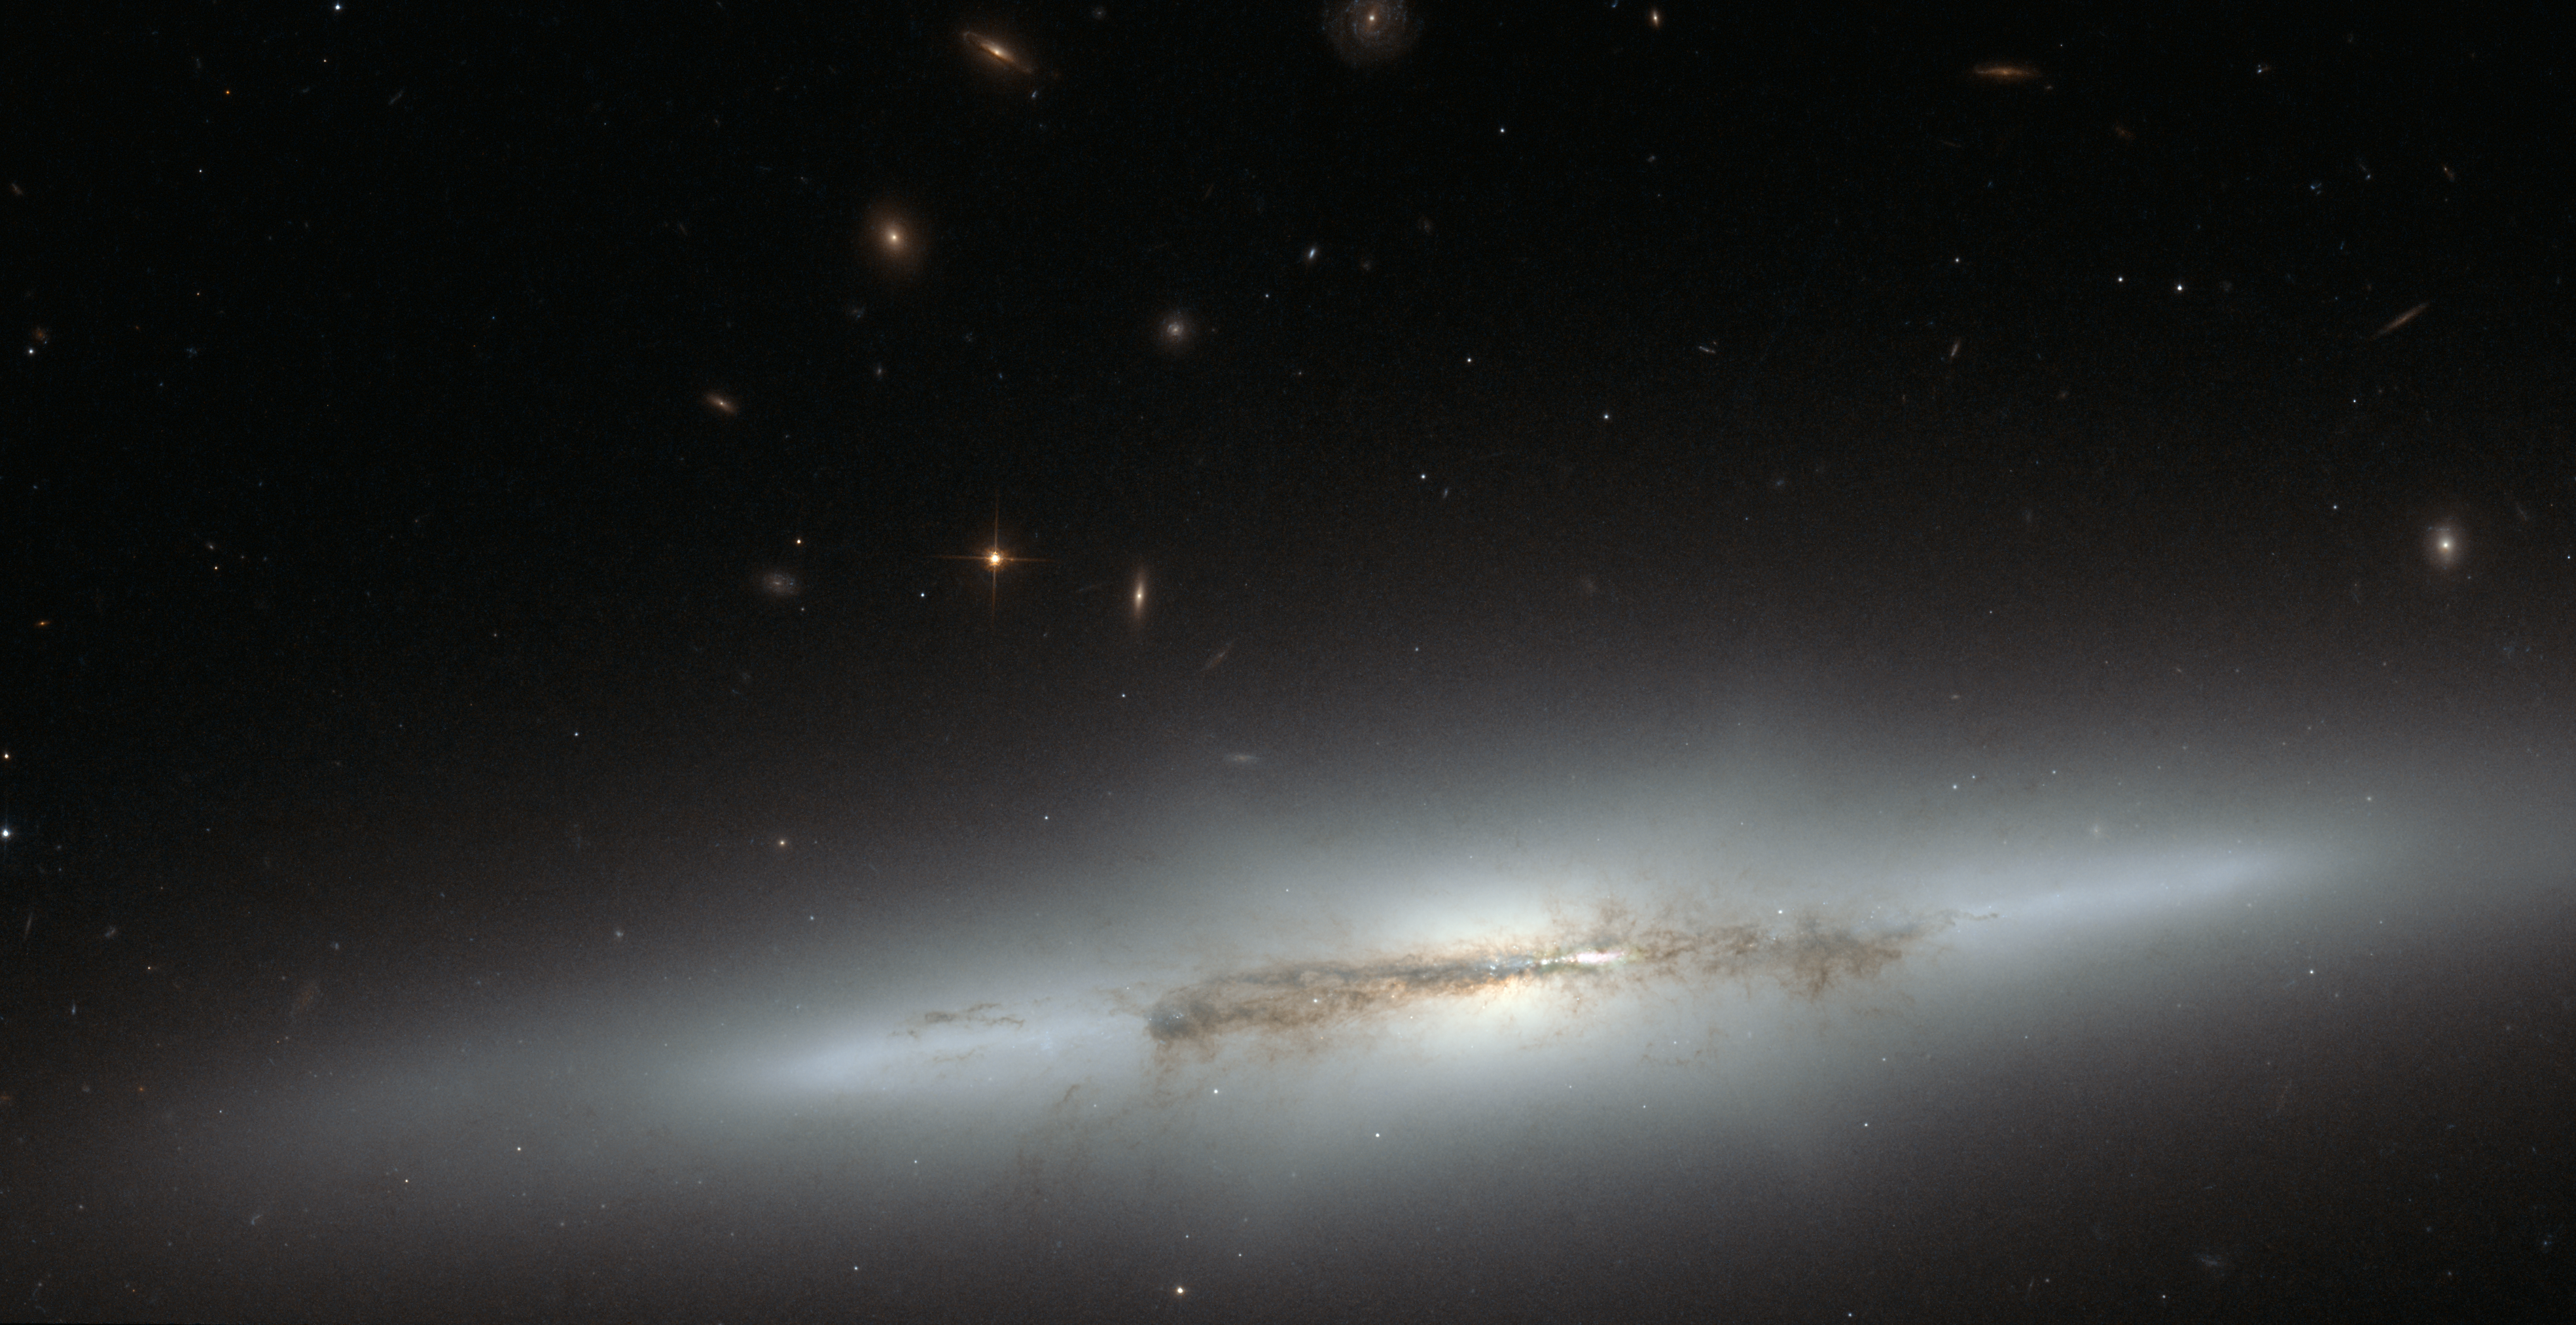

Hubble looks at sideways NGC 4710 (full)

Still an astrophysical mystery, the evolution of the bulges in spiral galaxies led astronomers to the edge-on galaxy NGC 4710. When staring directly at the centre of the galaxy, one can detect a faint, ethereal "X'-shaped structure. Such a feature, which astronomers call a "boxy" or "peanut-shaped" bulge, is due to the vertical motions of the stars in the galaxy's bar and is only evident when the galaxy is seen edge-on. This curiously shaped puff is often observed in spiral galaxies with small bulges and open arms, but is less common in spirals with arms tightly wrapped around a more prominent bulge, such as NGC 4710.

Credit: NASA & ESA